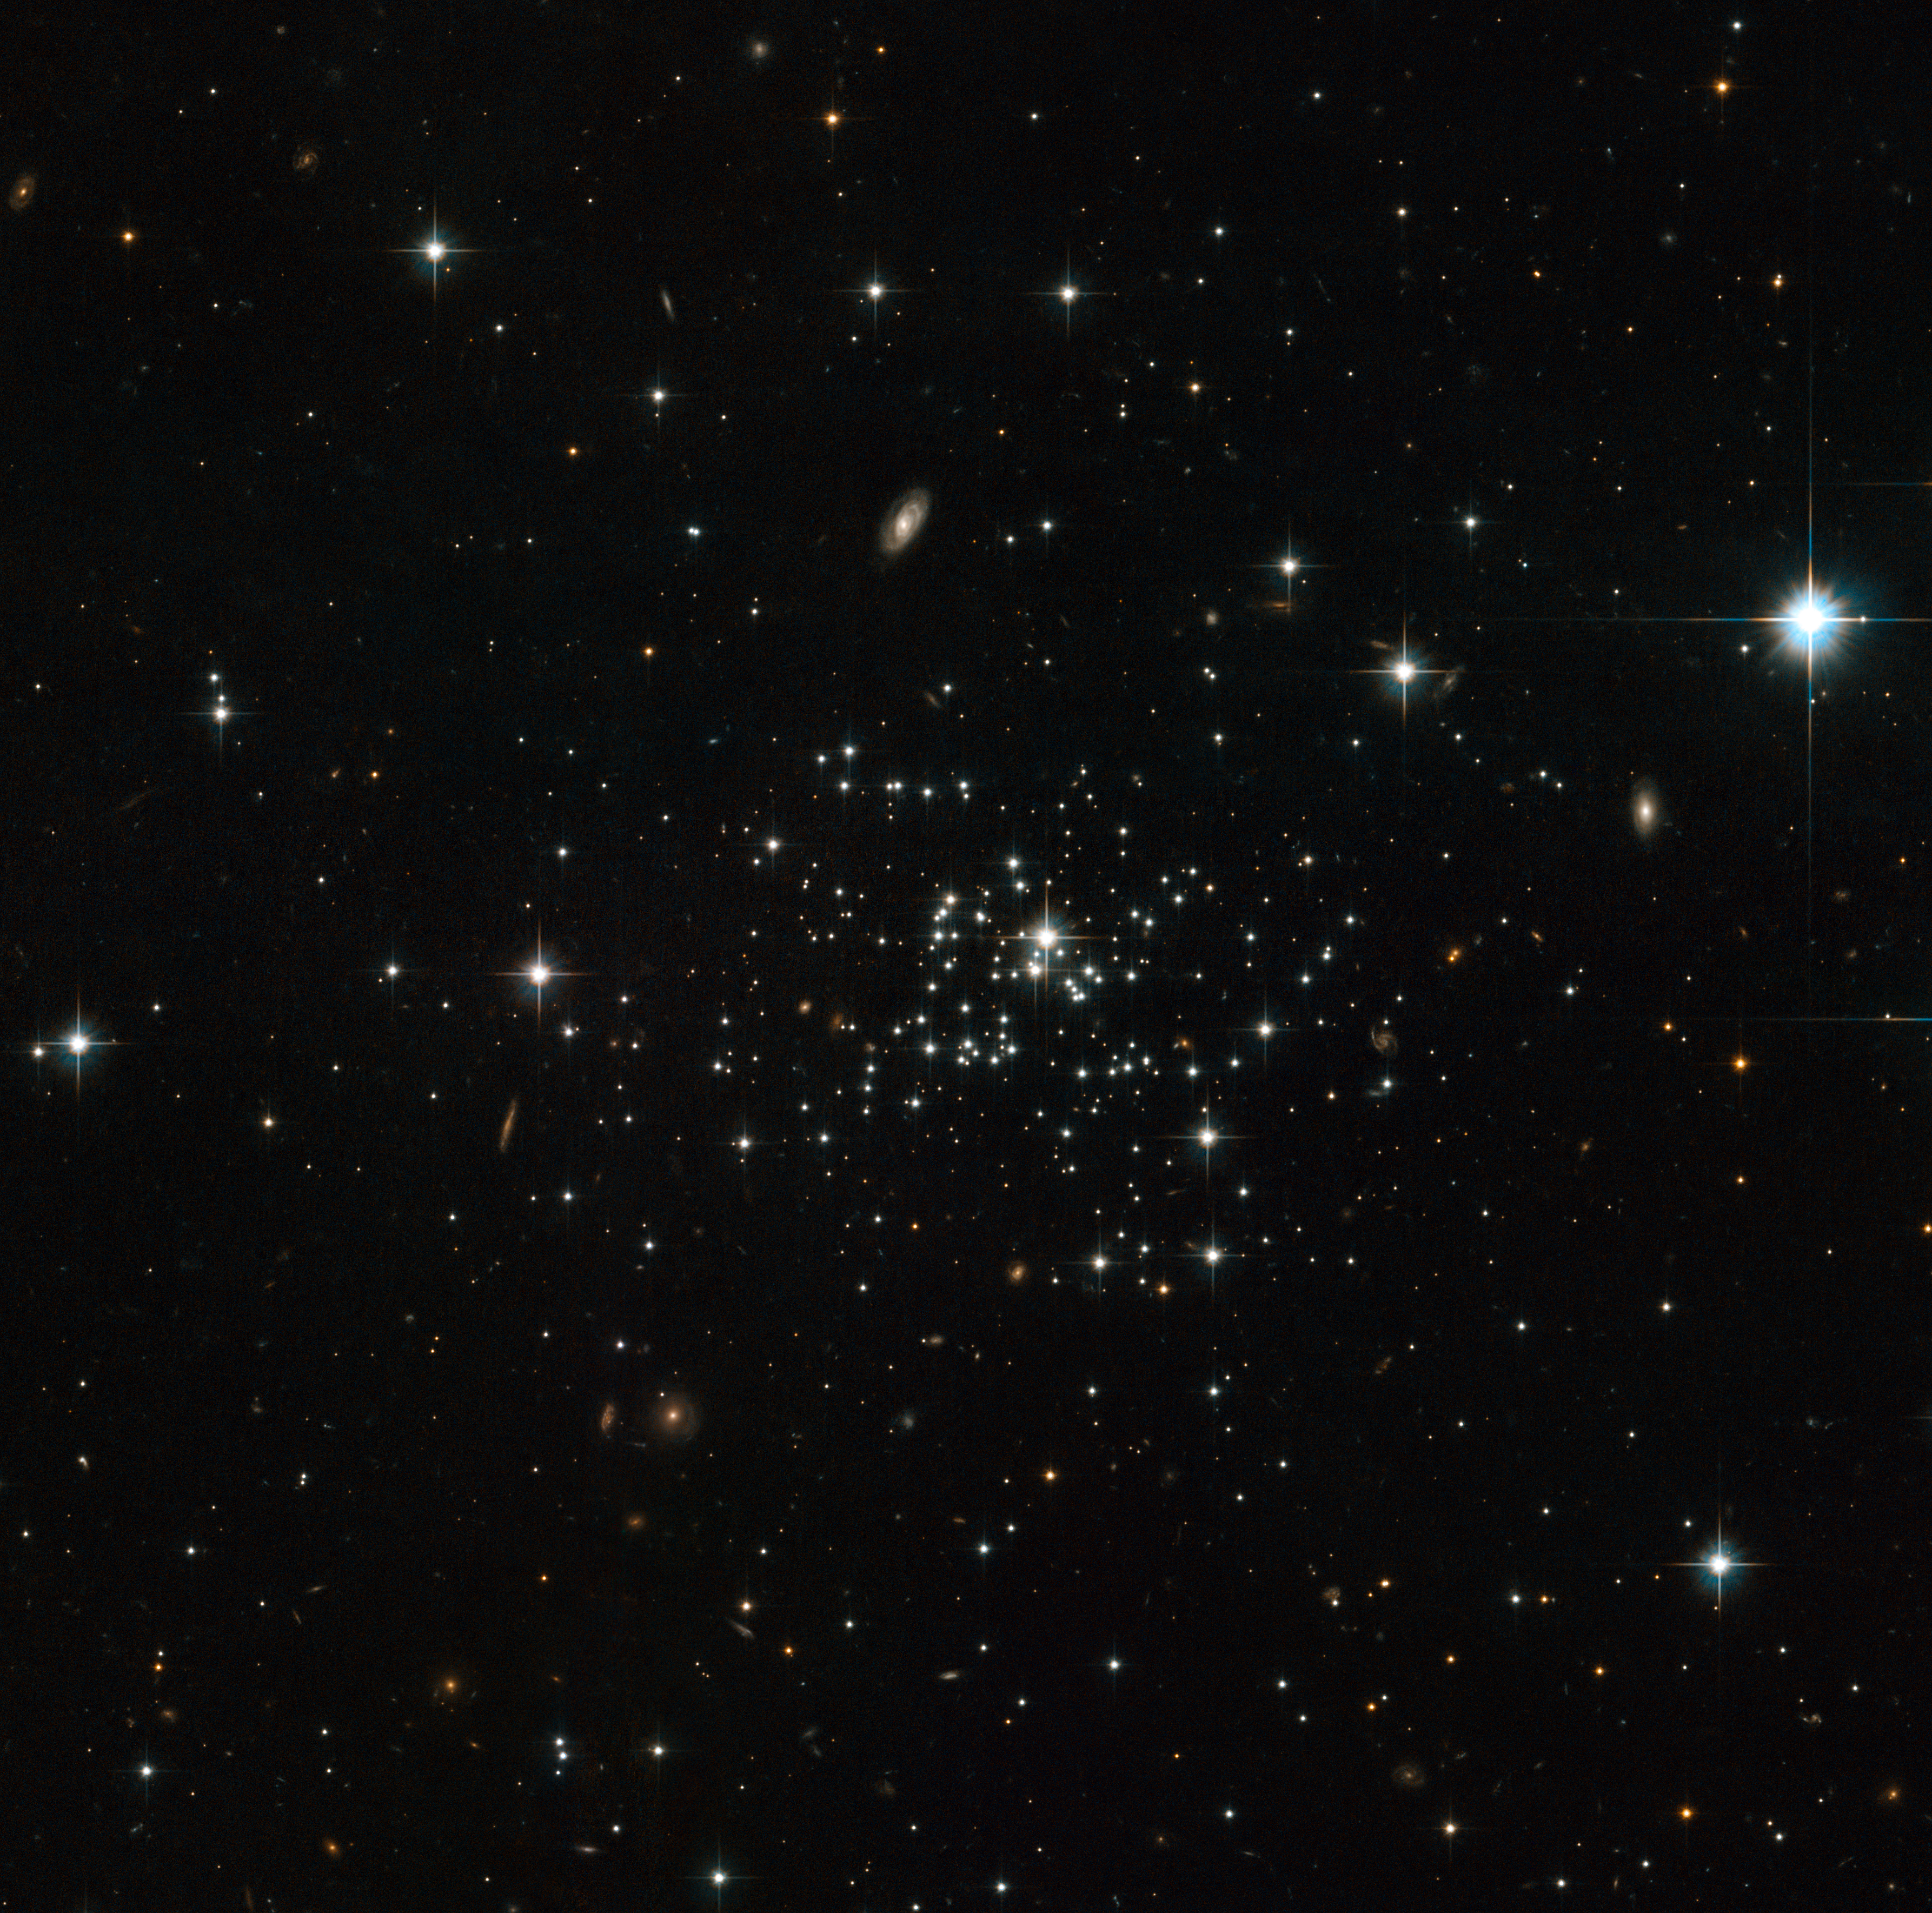

The secret of stellar youth

The NASA/ESA Hubble Space Telescope has captured a clear view of the unusual globular cluster Palomar 1, whose youthful beauty is a puzzle for astronomers. This faint and sparse object is very different from the more familiar brilliant and very rich globular clusters and had to wait until 1954 for its discovery by George Abell on photographs from the Palomar Schmidt telescope.

Globular clusters are tightly bound conglomerations of stars, which are found in the outer reaches of the Milky Way, in its so-called halo. They are amongst the oldest objects in a galaxy, containing very old stars and no gas, which means there is no possibility of newborn stars introducing some fresh blood into the cluster.

However, at 6.3 to 8 billion years old, Palomar 1 is a youngster in globular cluster terms — little more than half the age of most the other globulars in our Milky Way, which formed during our galaxy’s violent early history. However, astronomers suspect that globular youngsters, such as Palomar 1, formed in a more sedate manner. Possibly a gas cloud meandered around in the Milky Way’s halo until a trigger kick-started star formation. Another possibility is that the Milky Way captured the stellar group; perhaps it was adrift in the Universe before it was gravitationally attracted to our galaxy, or maybe it had a violent beginning after all and is the remnant of a dwarf galaxy that was devoured by the Milky Way.

Behind the sparsely populated Palomar 1 several background galaxies are seen and a few nearby bright foreground Milky Way stars are also visible. Together with Palomar 1 these objects make up an attractive “family portrait”.

This picture was created from images taken with the Wide Field Channel of the Advanced Camera for Surveys. Images through orange (F606W, coloured blue) and near-infrared (F814W, coloured red) filters were combined. The exposure times were 1965 s per filter and the field of view is 3.0 arcminutes across.

Credit: ESA/Hubble & NASA